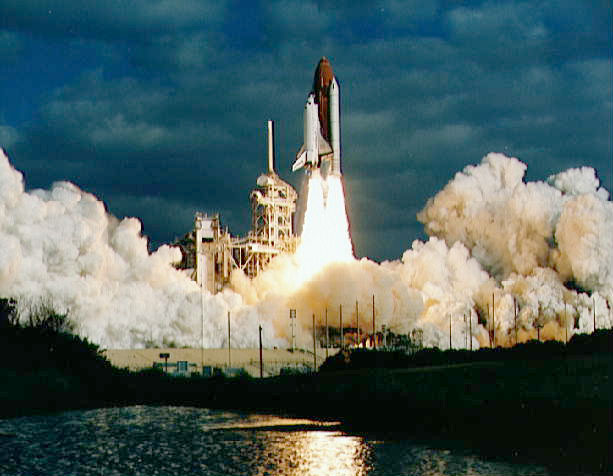

Launch of the Discovery

The Space Shuttle Discovery is launched in this image.

Credit: NASA